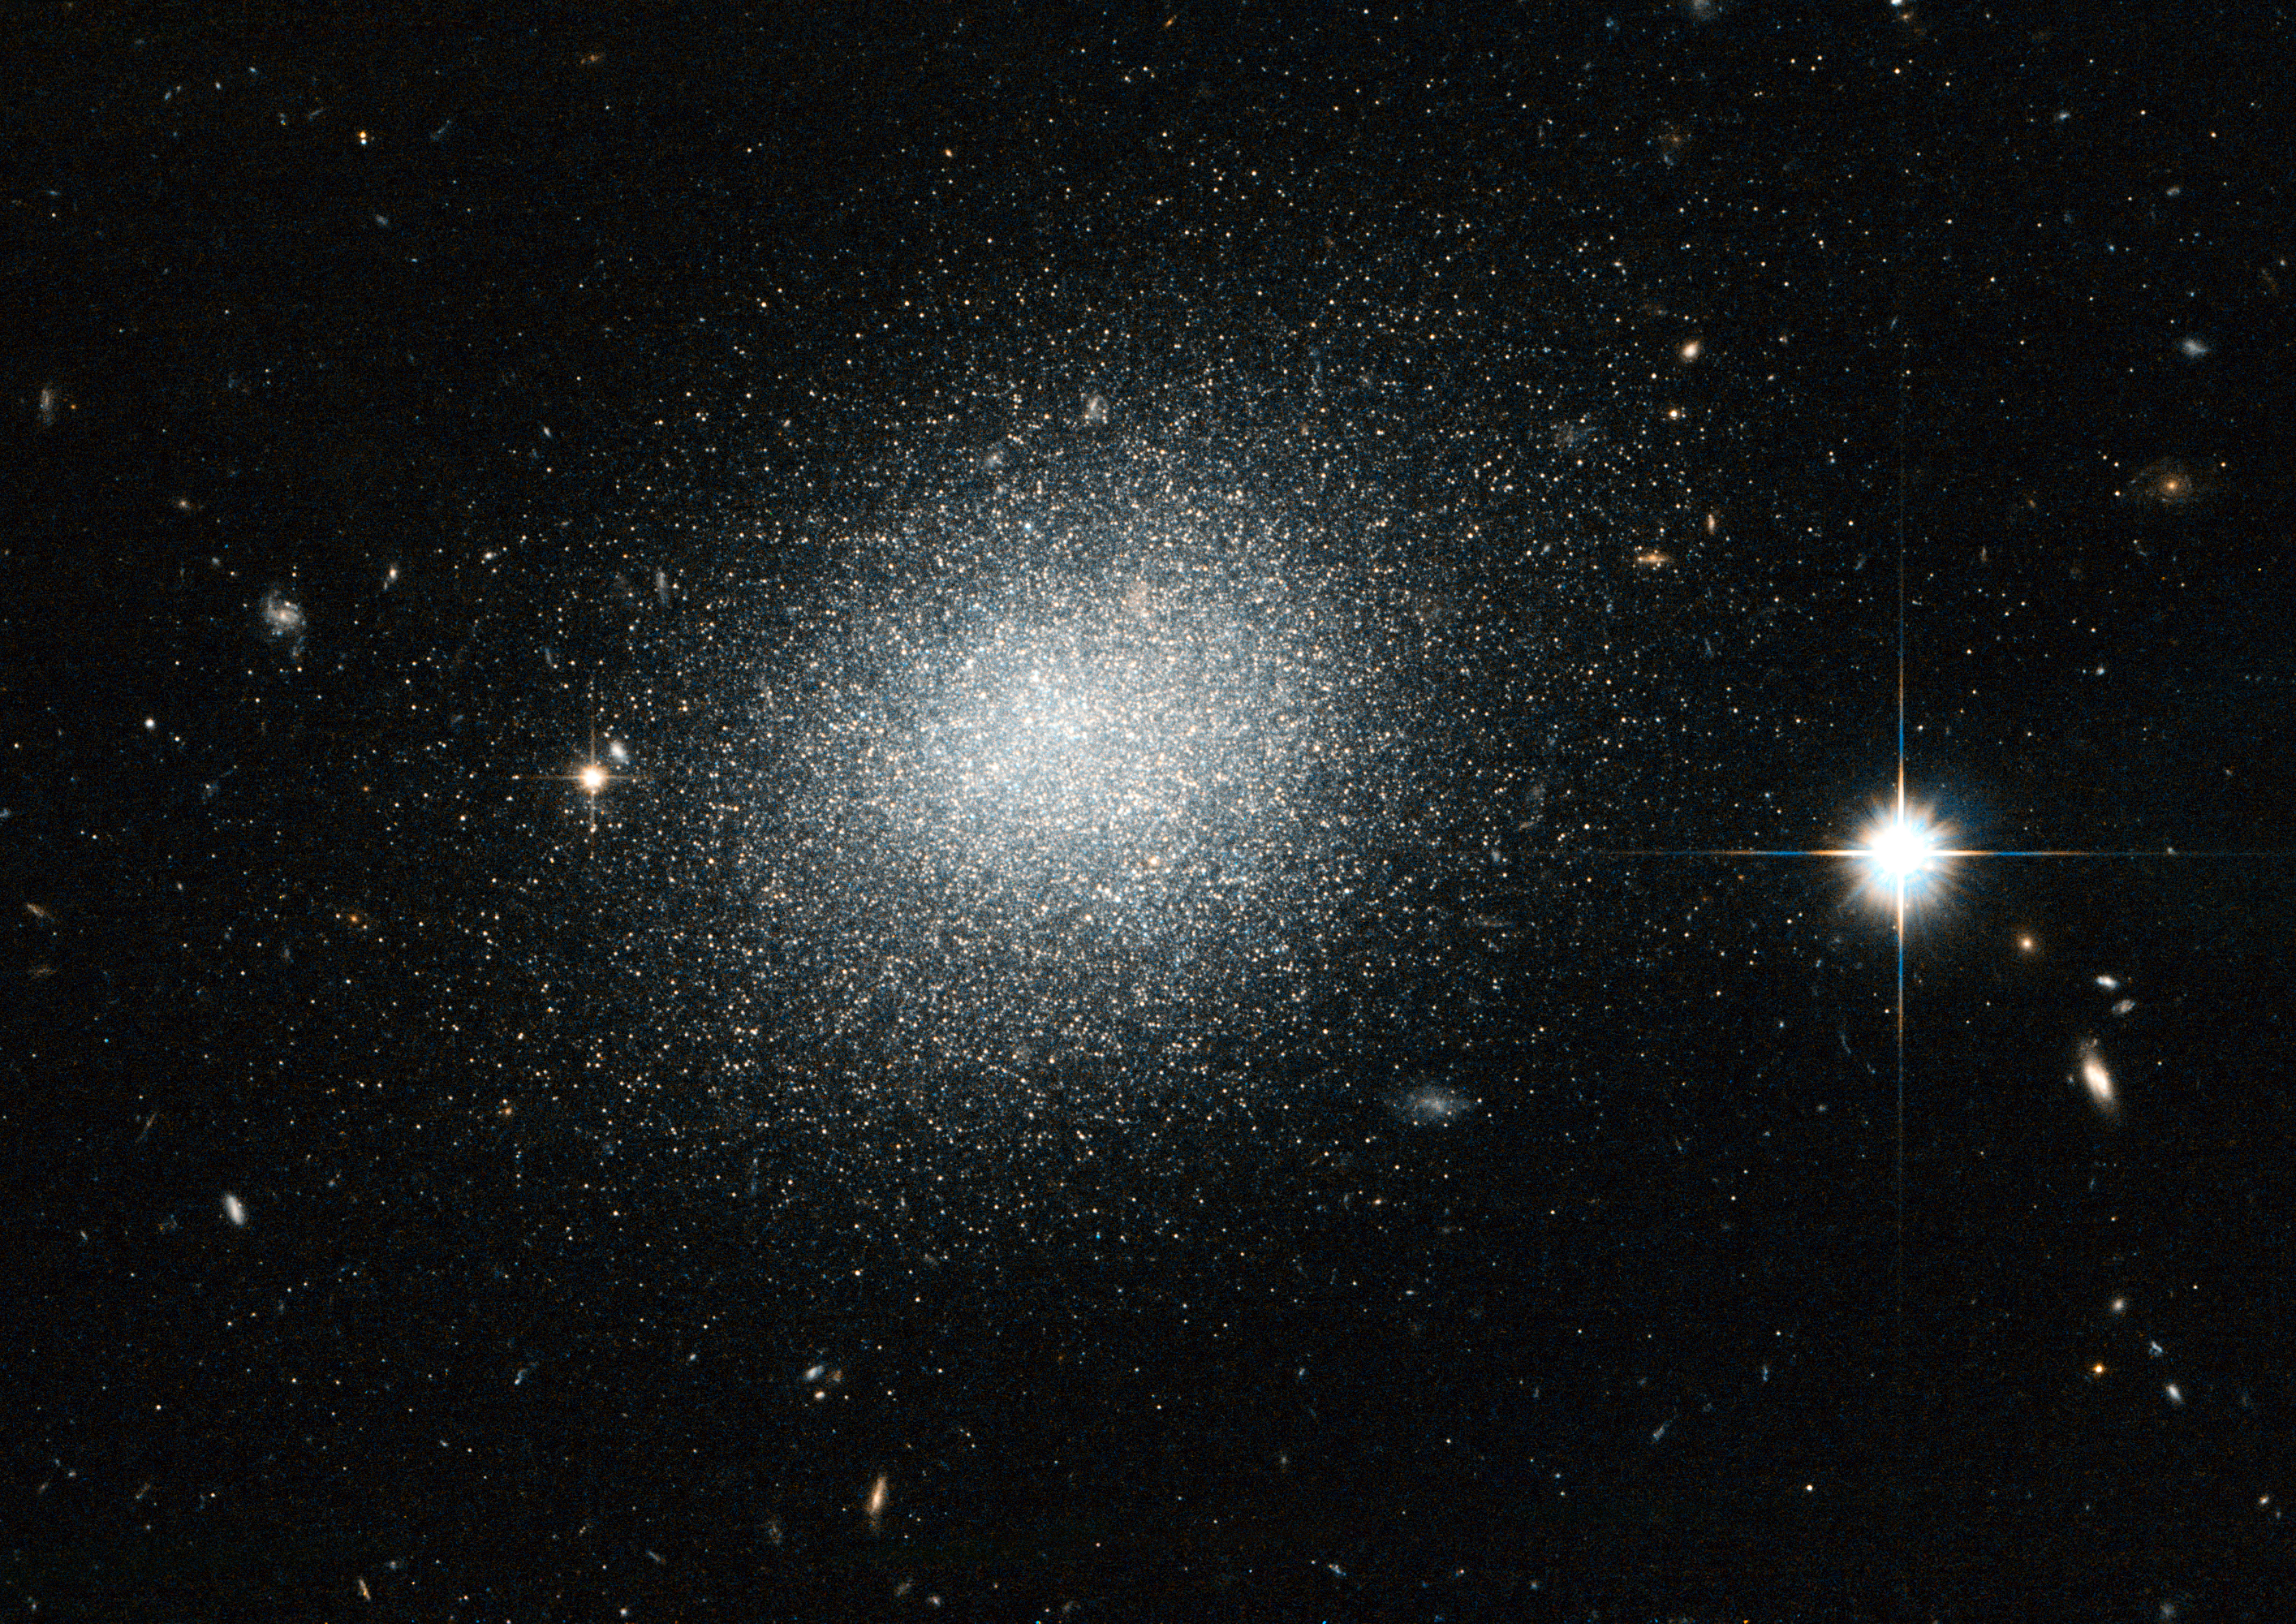

Compact blue dwarf can’t hide

The NASA/ESA Hubble Space Telescope has captured this view of the dwarf galaxy UGC 5497, which looks a bit like salt dashed on black velvet in this image.

The object is a compact blue dwarf galaxy that is infused with newly formed clusters of stars. The bright, blue stars that arise in these clusters help to give the galaxy an overall bluish appearance that lasts for several million years until these fast-burning stars explode as supernovae.

UGC 5497 is considered part of the M 81 group of galaxies, which is located about 12 million light-years away in the constellation Ursa Major (The Great Bear). UGC 5497 turned up in a ground-based telescope survey back in 2008 looking for new dwarf galaxy candidates associated with Messier 81.

According to the leading cosmological theory of galaxy formation, called Lambda Cold Dark Matter, there should be far more satellite dwarf galaxies associated with big galaxies like the Milky Way and Messier 81 than are currently known. Finding previously overlooked objects such as this one has helped cut into the expected tally — but only by a small amount.

Astrophysicists therefore remain puzzled over the so-called "missing satellite" problem.

The field of view in this image, which is a combination of visible and infrared exposures from Hubble’s Advanced Camera for Surveys, is approximately 3.4 by 3.4 arcminutes.

Credit: ESA/Hubble & NASA